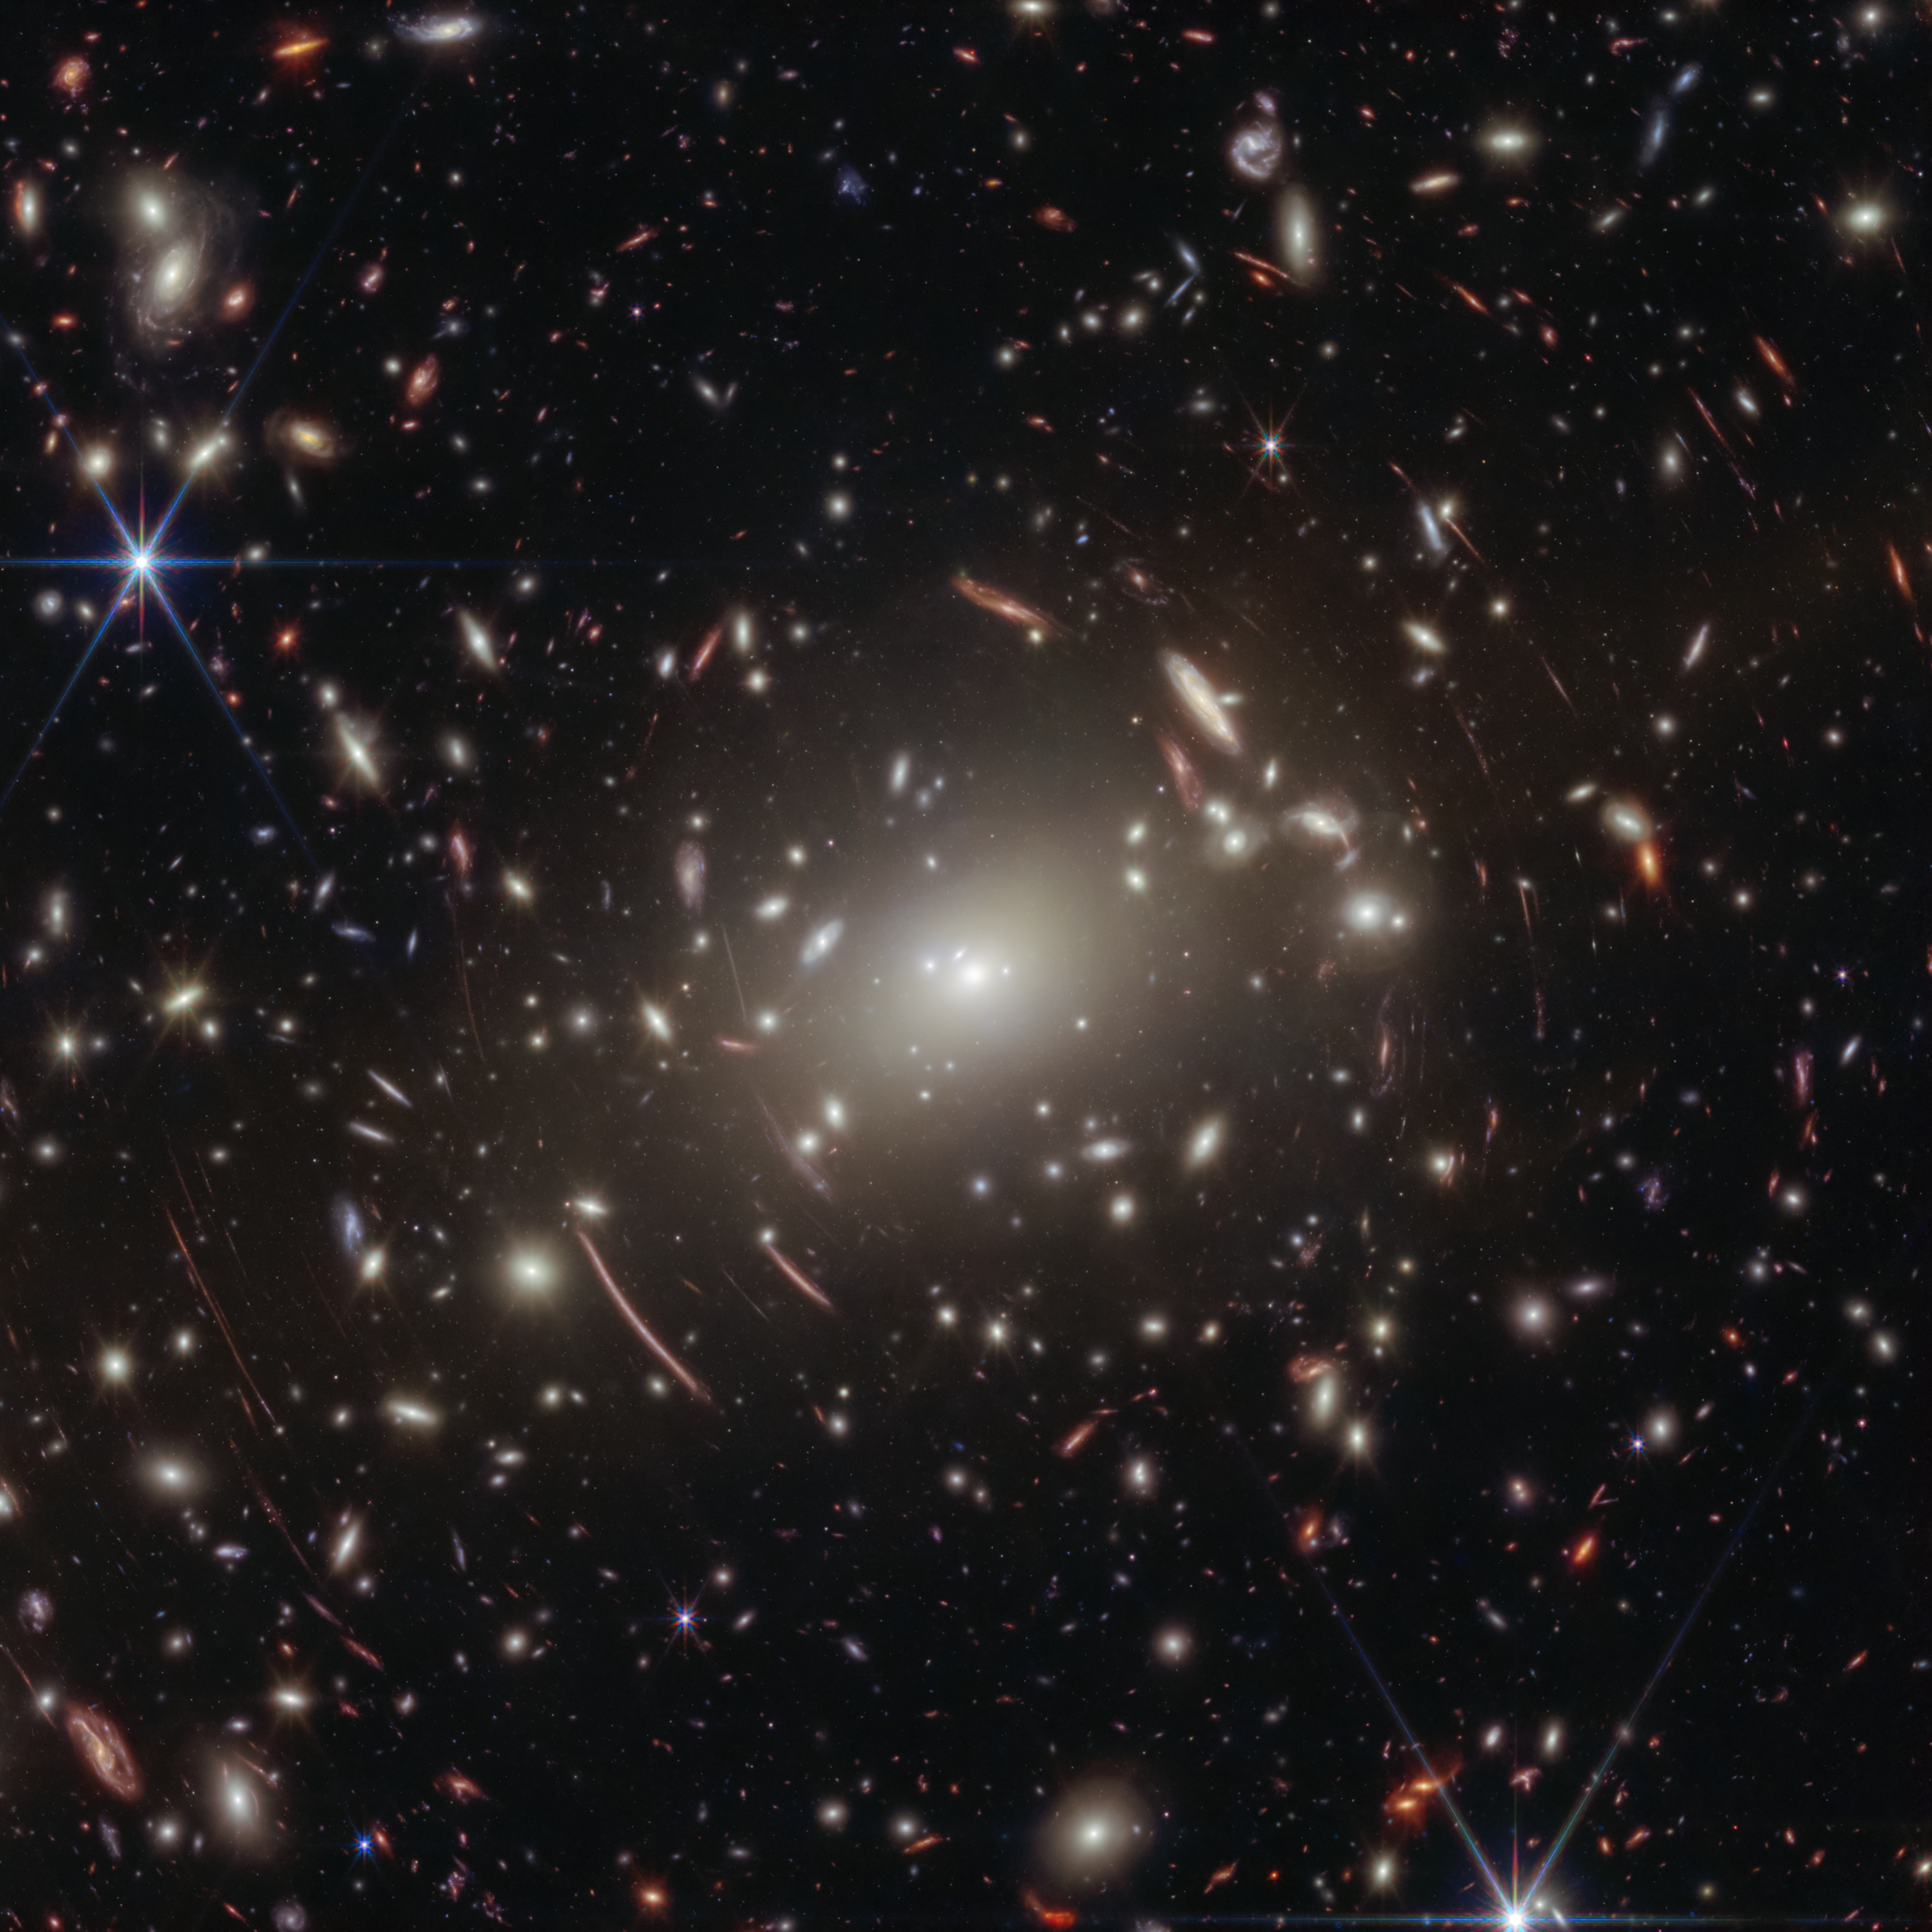

Abell S1063 galaxy cluster

The little red dot that would come to be known as GLIMPSE-17775 was fortunately included in the NASA/ESA/CSA James Webb Space Telescope’s field of view as it was observing this galaxy cluster Abell S1063 for a different scientific purpose.

Since galaxy clusters like Abell S1063 are some of the most massive objects in the Universe, light emitted by objects farther away can become distorted as it reaches the telescope. This effect is known as gravitational lensing. The combination of Webb’s 30 hours of observing time and gravitational lensing enabled scientists to obtain the deepest spectrum to date of a little red dot. The result: the strongest evidence to date of a hot, dense gas cocoon known as a “black hole star.”

Credit: NASA, ESA, CSA, V. Kokorev (University of Texas at Austin), A. Pagan (STScI)